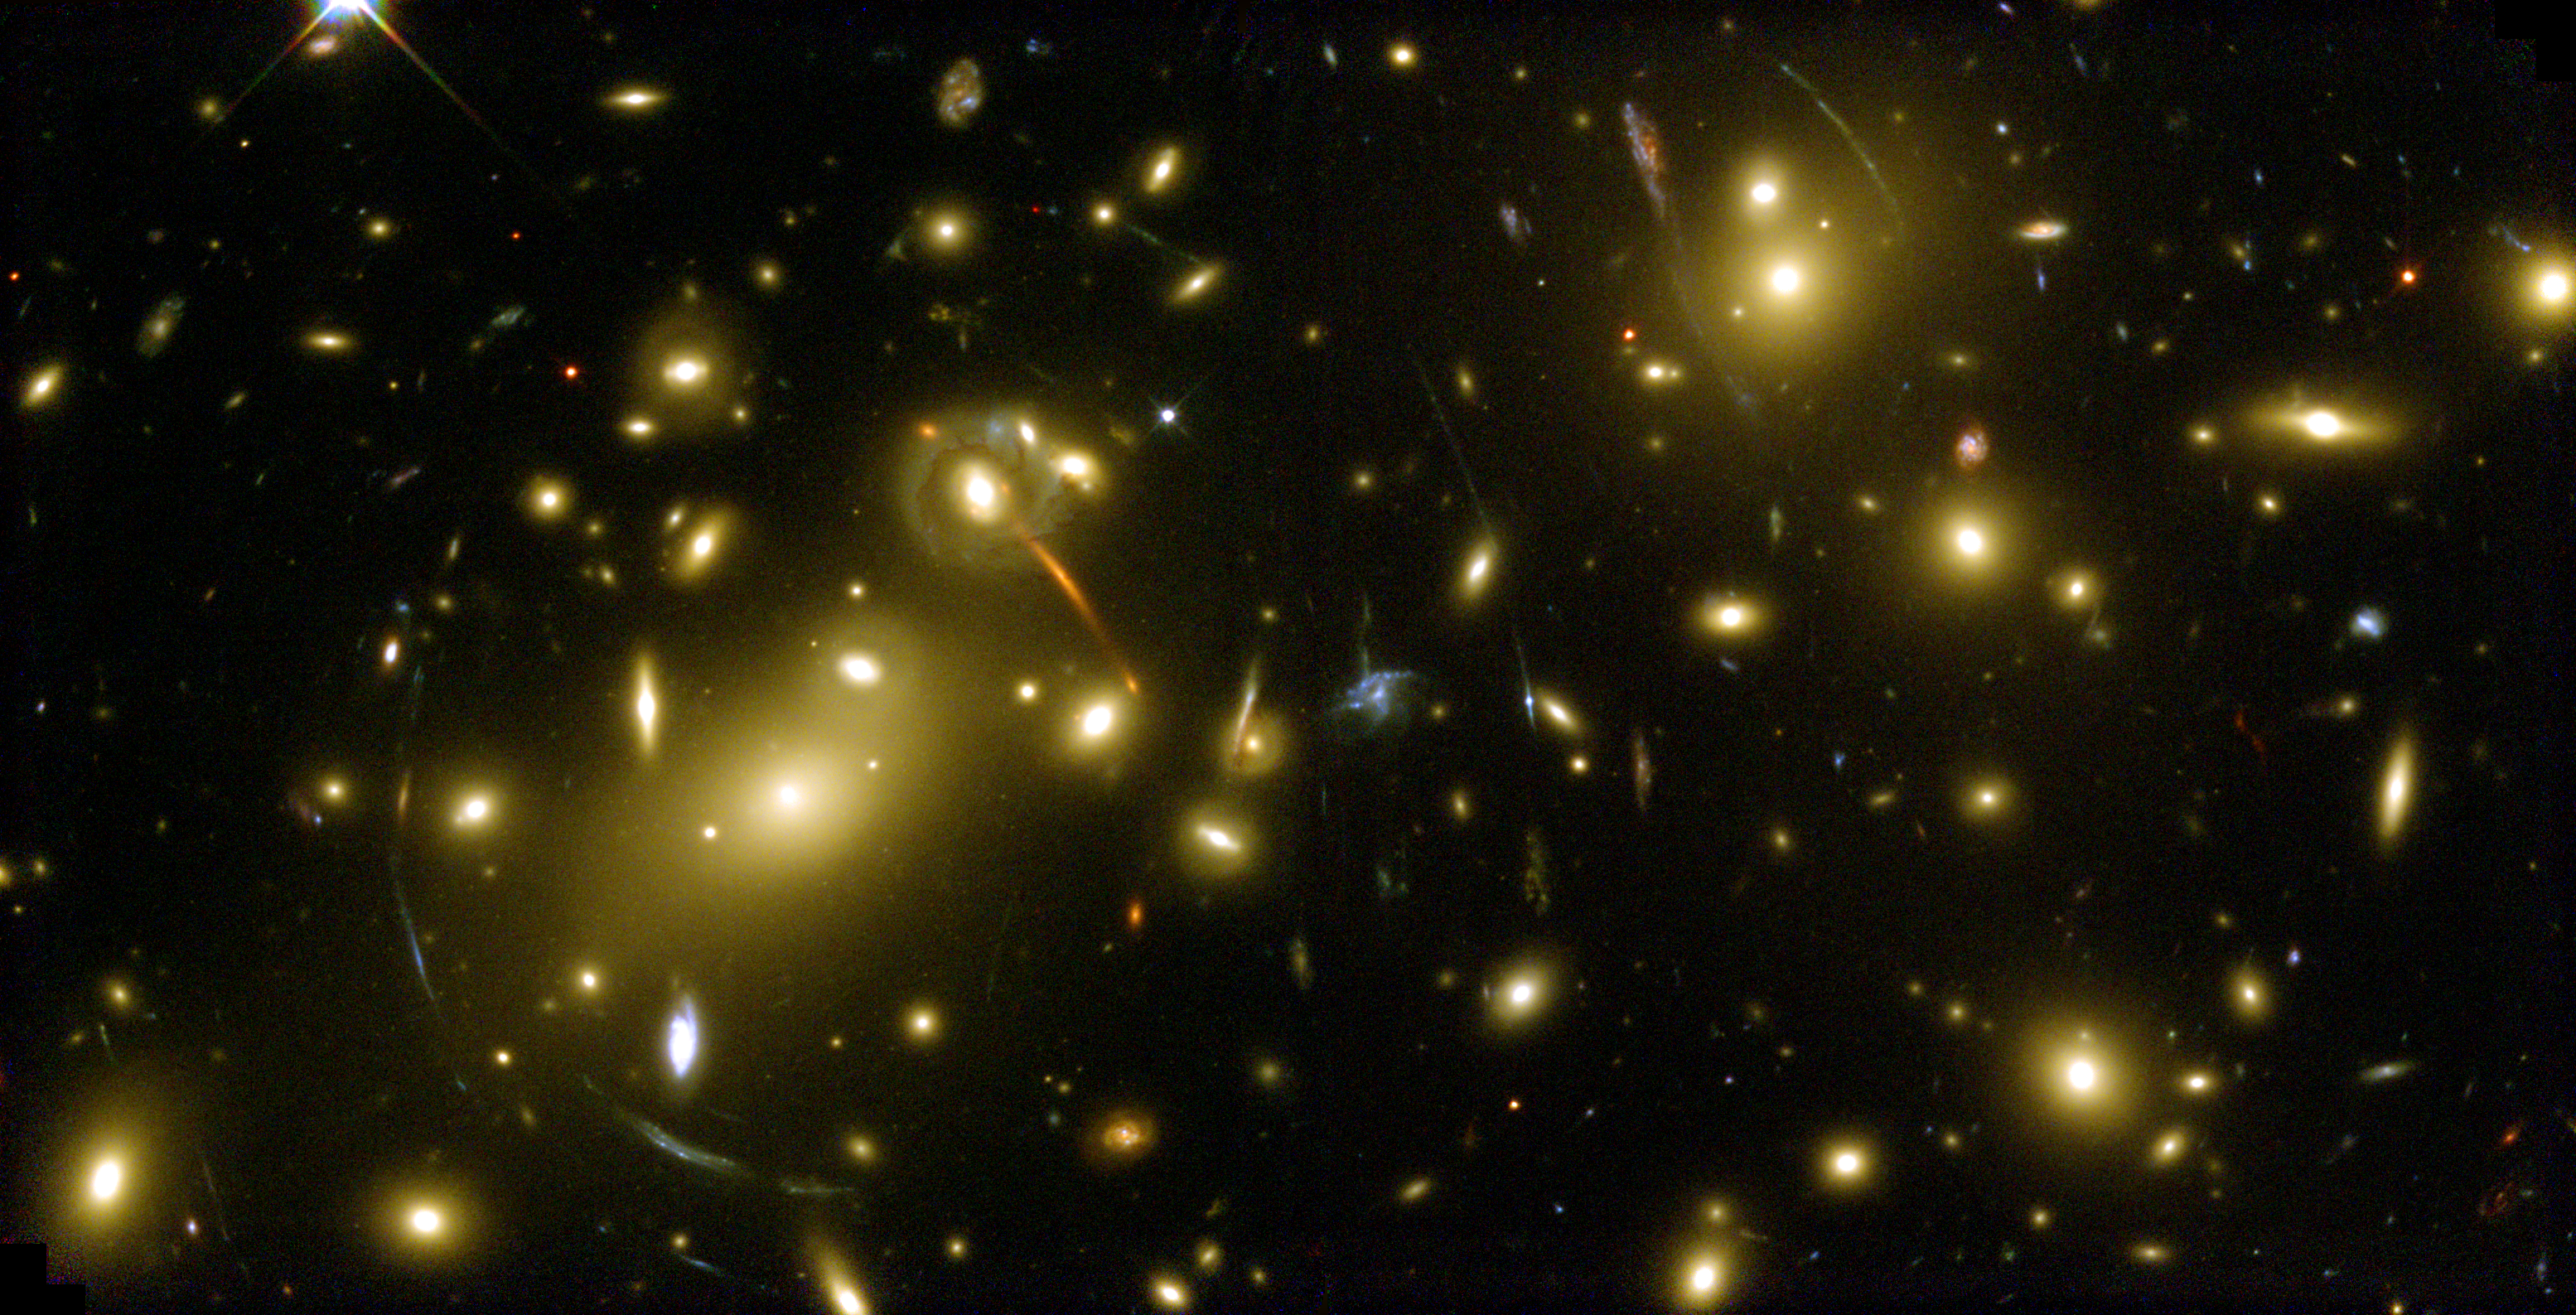

Galaxy Cluster Abell 2218 - a Cosmic Magnifying Glass

Scanning the heavens for the first time since the successful December 1999 servicing mission, the NASA/ESA Hubble Space Telescope has imaged a giant, cosmic magnifying glass, a massive cluster of galaxies called Abell 2218. This 'hefty' cluster resides in the constellation Draco, some 2 billion light-years from Earth.

Credit: NASA, ESA, Andrew Fruchter (STScI), and the ERO team (STScI + ST-ECF)